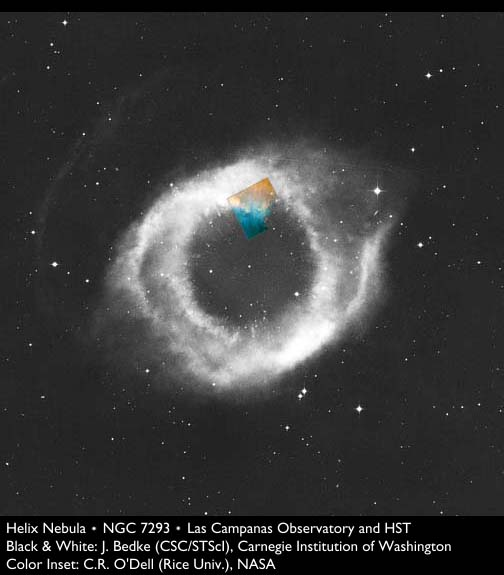

Colliding Gas in the Helix Nebula

This ground-based image shows where the smaller Hubble image is located.

Credit: Robert O'Dell (Rice Univ.), NASA/ESA